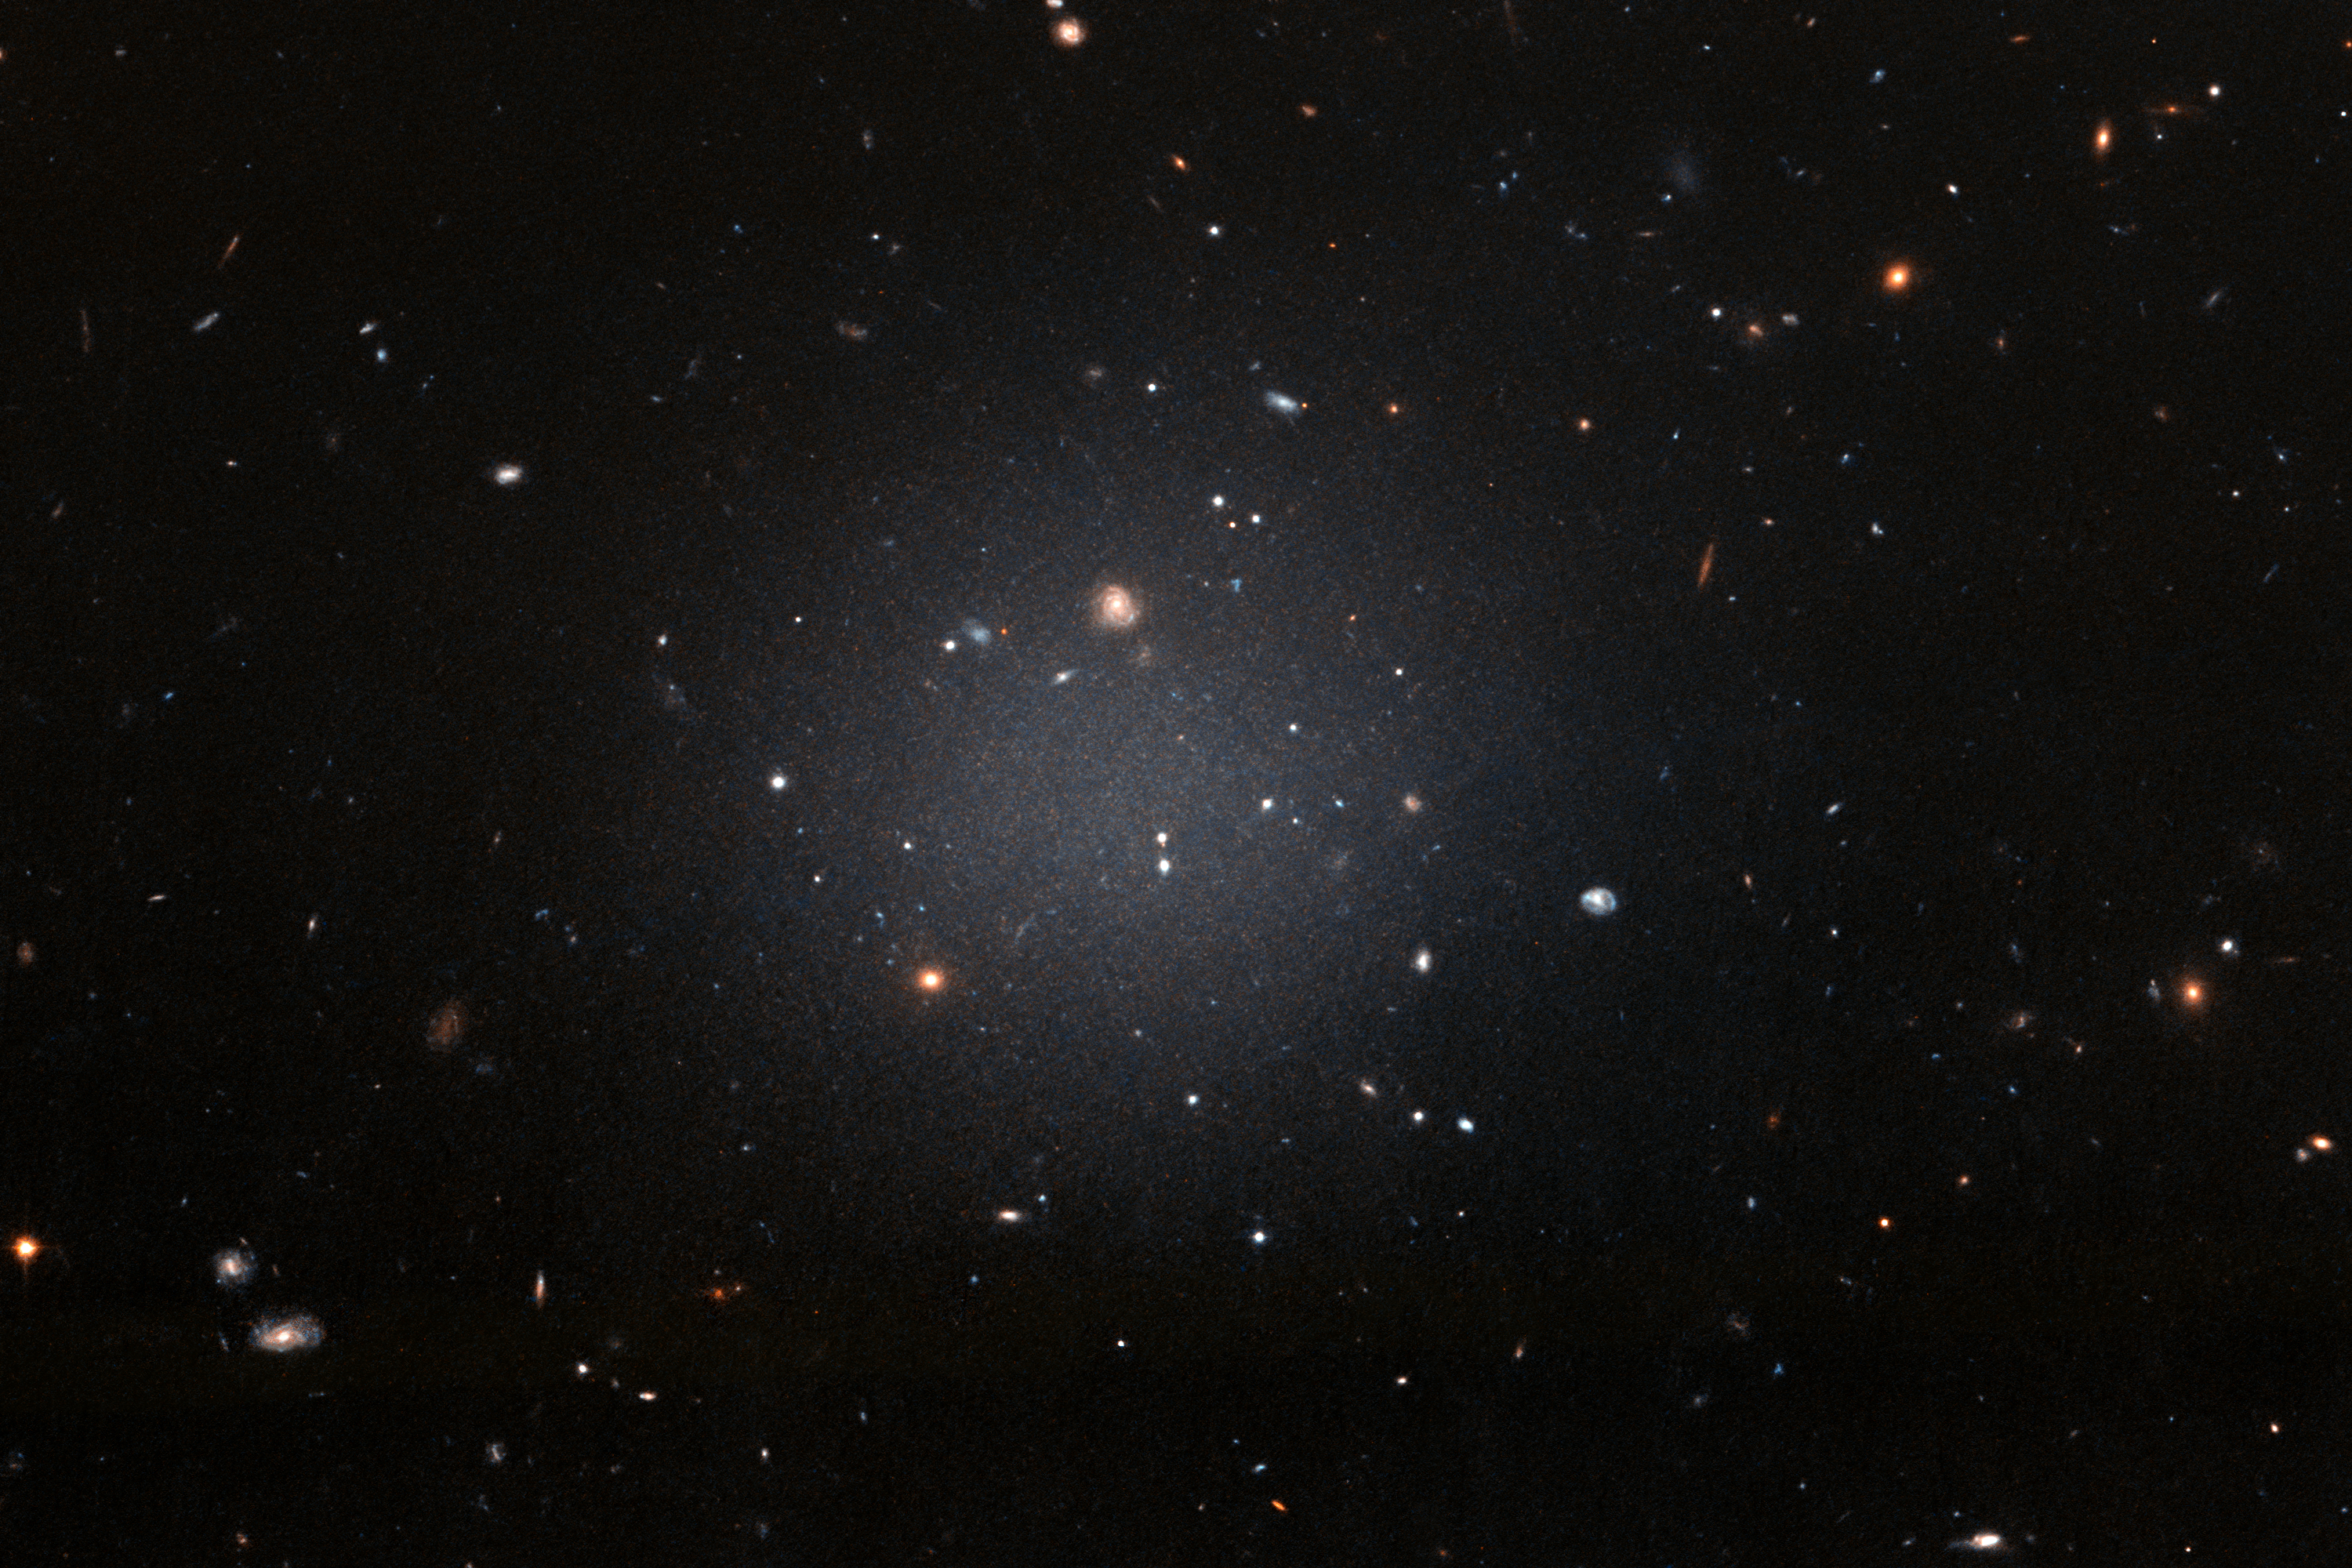

A ghostly galaxy lacking dark matter

NGC 1052-DF2 resides about 65 million light-years away in the NGC 1052 Group, which is dominated by a massive elliptical galaxy called NGC 1052.

This large, fuzzy-looking galaxy is so diffuse that astronomers can clearly see distant galaxies behind it. This ghostly galaxy is not well-formed. It does not look like a typical spiral galaxy, but it does not look like an elliptical galaxy either. Based on the colours of its globular clusters, the galaxy is about 10 billion years old. However, even the globular clusters are strange: they are twice as large as typical groups of stars.

All of these oddities pale in comparison to the weirdest aspect of this galaxy: NGC 1052-DF2 is missing most, if not all, of its dark matter. The galaxy contains only a tiny fraction of dark matter that astronomers would expect for a galaxy this size. But how it formed is a complete mystery.

Hubble took this image on 16 November 2017 using its Advanced Camera for Surveys.

Credit: NASA, ESA, and P. van Dokkum (Yale University)